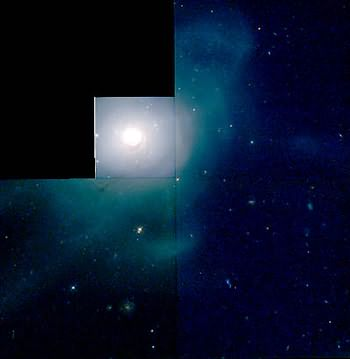

HST/WFPC2 image of galaxy NGC 7252

The Hubble telescope has uncovered over 1,000 bright; young star clusters bursting to life in a brief, intense, brilliant "fireworks show" at the heart of a pair of colliding galaxies.

Credit: Brad Whitmore (STScI)